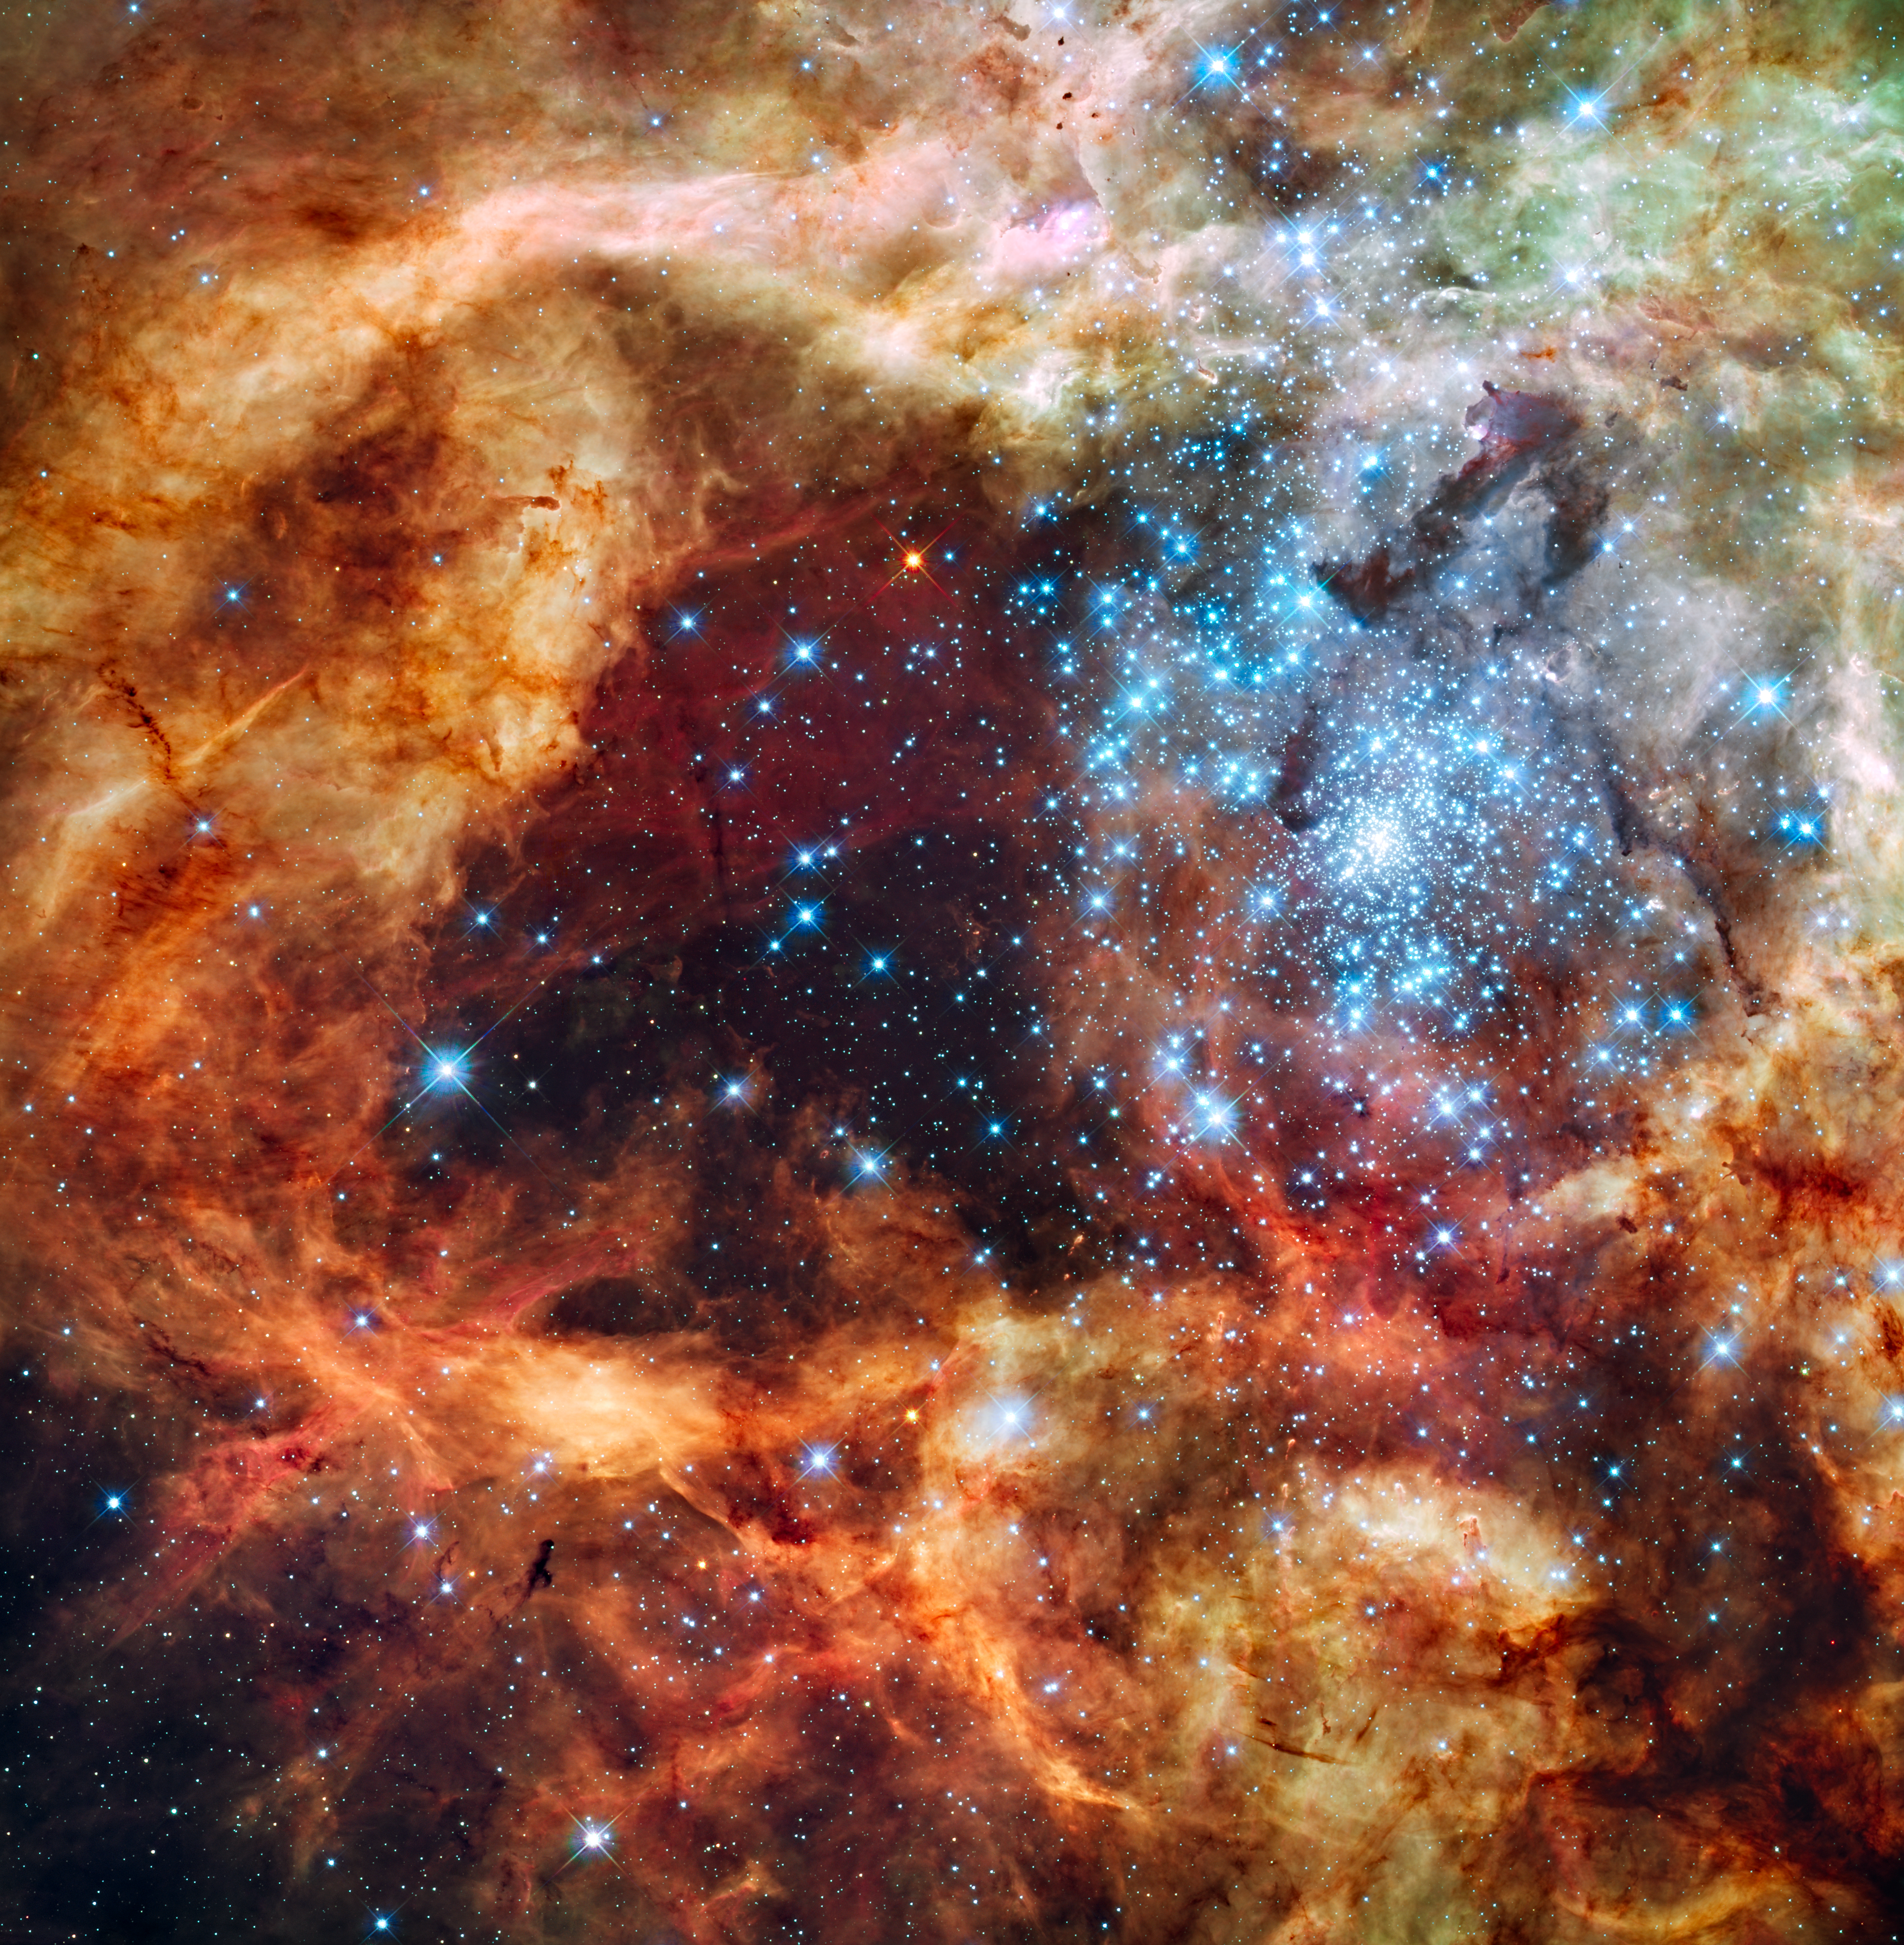

Hubble's festive view of a grand star-forming region

Just in time for the holidays: a Hubble Space Telescope picture postcard of hundreds of brilliant blue stars wreathed by warm, glowing clouds. The festive portrait is the most detailed view of the largest stellar nursery in our local galactic neighborhood.

The massive, young stellar grouping, called R136, is only a few million years old and resides in the 30 Doradus Nebula, a turbulent star-birth region in the Large Magellanic Cloud (LMC), a satellite galaxy of our Milky Way. There is no known star-forming region in our galaxy as large or as prolific as 30 Doradus.

Many of the diamond-like icy blue stars are among the most massive stars known. Several of them are over 100 times more massive than our Sun. These hefty stars are destined to pop off, like a string of firecrackers, as supernovas in a few million years.

The image, taken in ultraviolet, visible, and red light by Hubble's Wide Field Camera 3, spans about 100 light-years. The nebula is close enough to Earth that Hubble can resolve individual stars, giving astronomers important information about the stars' birth and evolution.

The brilliant stars are carving deep cavities in the surrounding material by unleashing a torrent of ultraviolet light, and hurricane-force stellar winds (streams of charged particles), which are etching away the enveloping hydrogen gas cloud in which the stars were born. The image reveals a fantasy landscape of pillars, ridges, and valleys, as well as a dark region in the center that roughly looks like the outline of a holiday tree. Besides sculpting the gaseous terrain, the brilliant stars can also help create a successive generation of offspring. When the winds hit dense walls of gas, they create shocks, which may be generating a new wave of star birth.

The movement of the LMC around the Milky Way may have triggered the massive cluster's formation in several ways. The gravitational tug of the Milky Way and the companion Small Magellanic Cloud may have compressed gas in the LMC. Also, the pressure resulting from the LMC plowing through the Milky Way's halo may have compressed gas in the satellite. The cluster is a rare, nearby example of the many super star clusters that formed in the distant, early universe, when star birth and galaxy interactions were more frequent. Previous Hubble observations have shown astronomers that super star clusters in faraway galaxies are ubiquitous.

The LMC is located 170,000 light-years away and is a member of the Local Group of Galaxies, which also includes the Milky Way.

The Hubble observations were taken Oct. 20-27, 2009. The blue color is light from the hottest, most massive stars; the green from the glow of oxygen; and the red from fluorescing hydrogen.

Credit: NASA, ESA, and F. Paresce (INAF-IASF, Bologna, Italy), R. O'Connell (University of Virginia, Charlottesville), and the Wide Field Camera 3 Science Oversight Committee